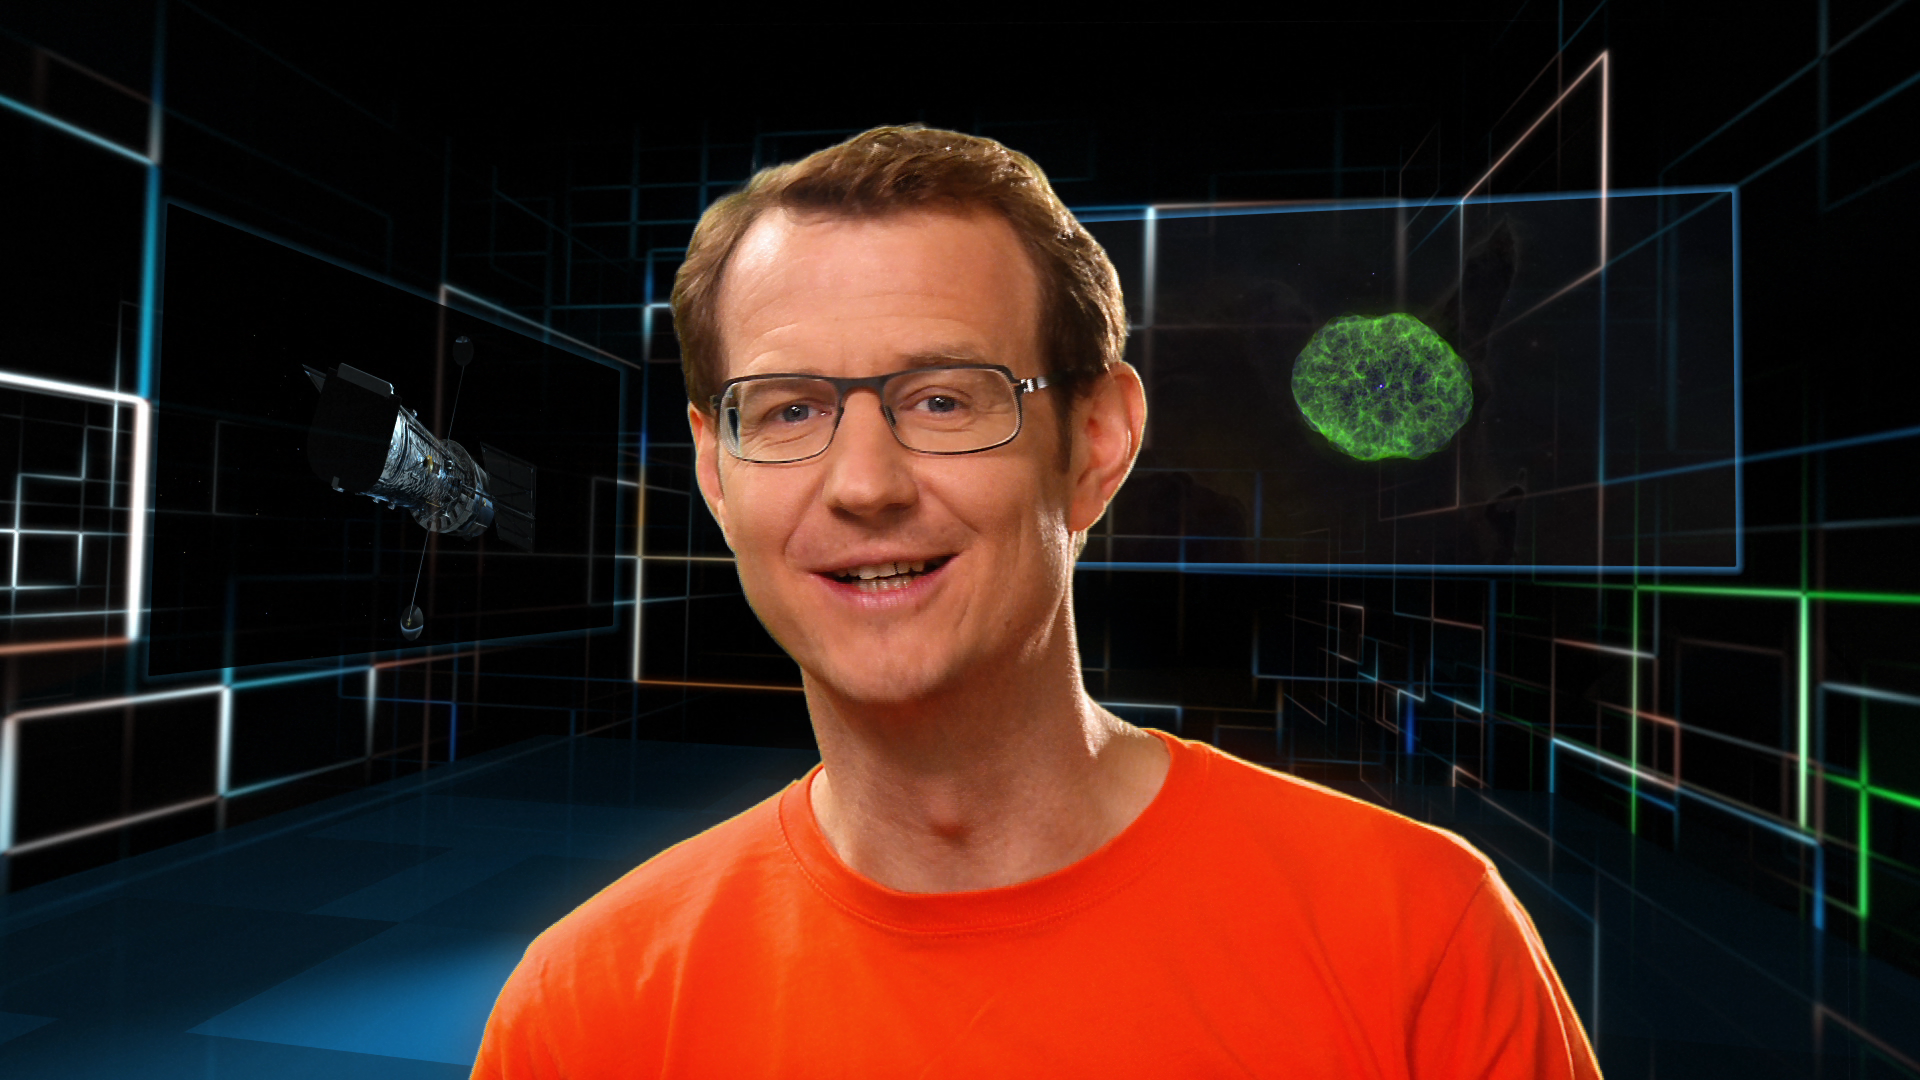

Screenshot of Hublecast 57

Watch the video here

Credit: NASA & ESA